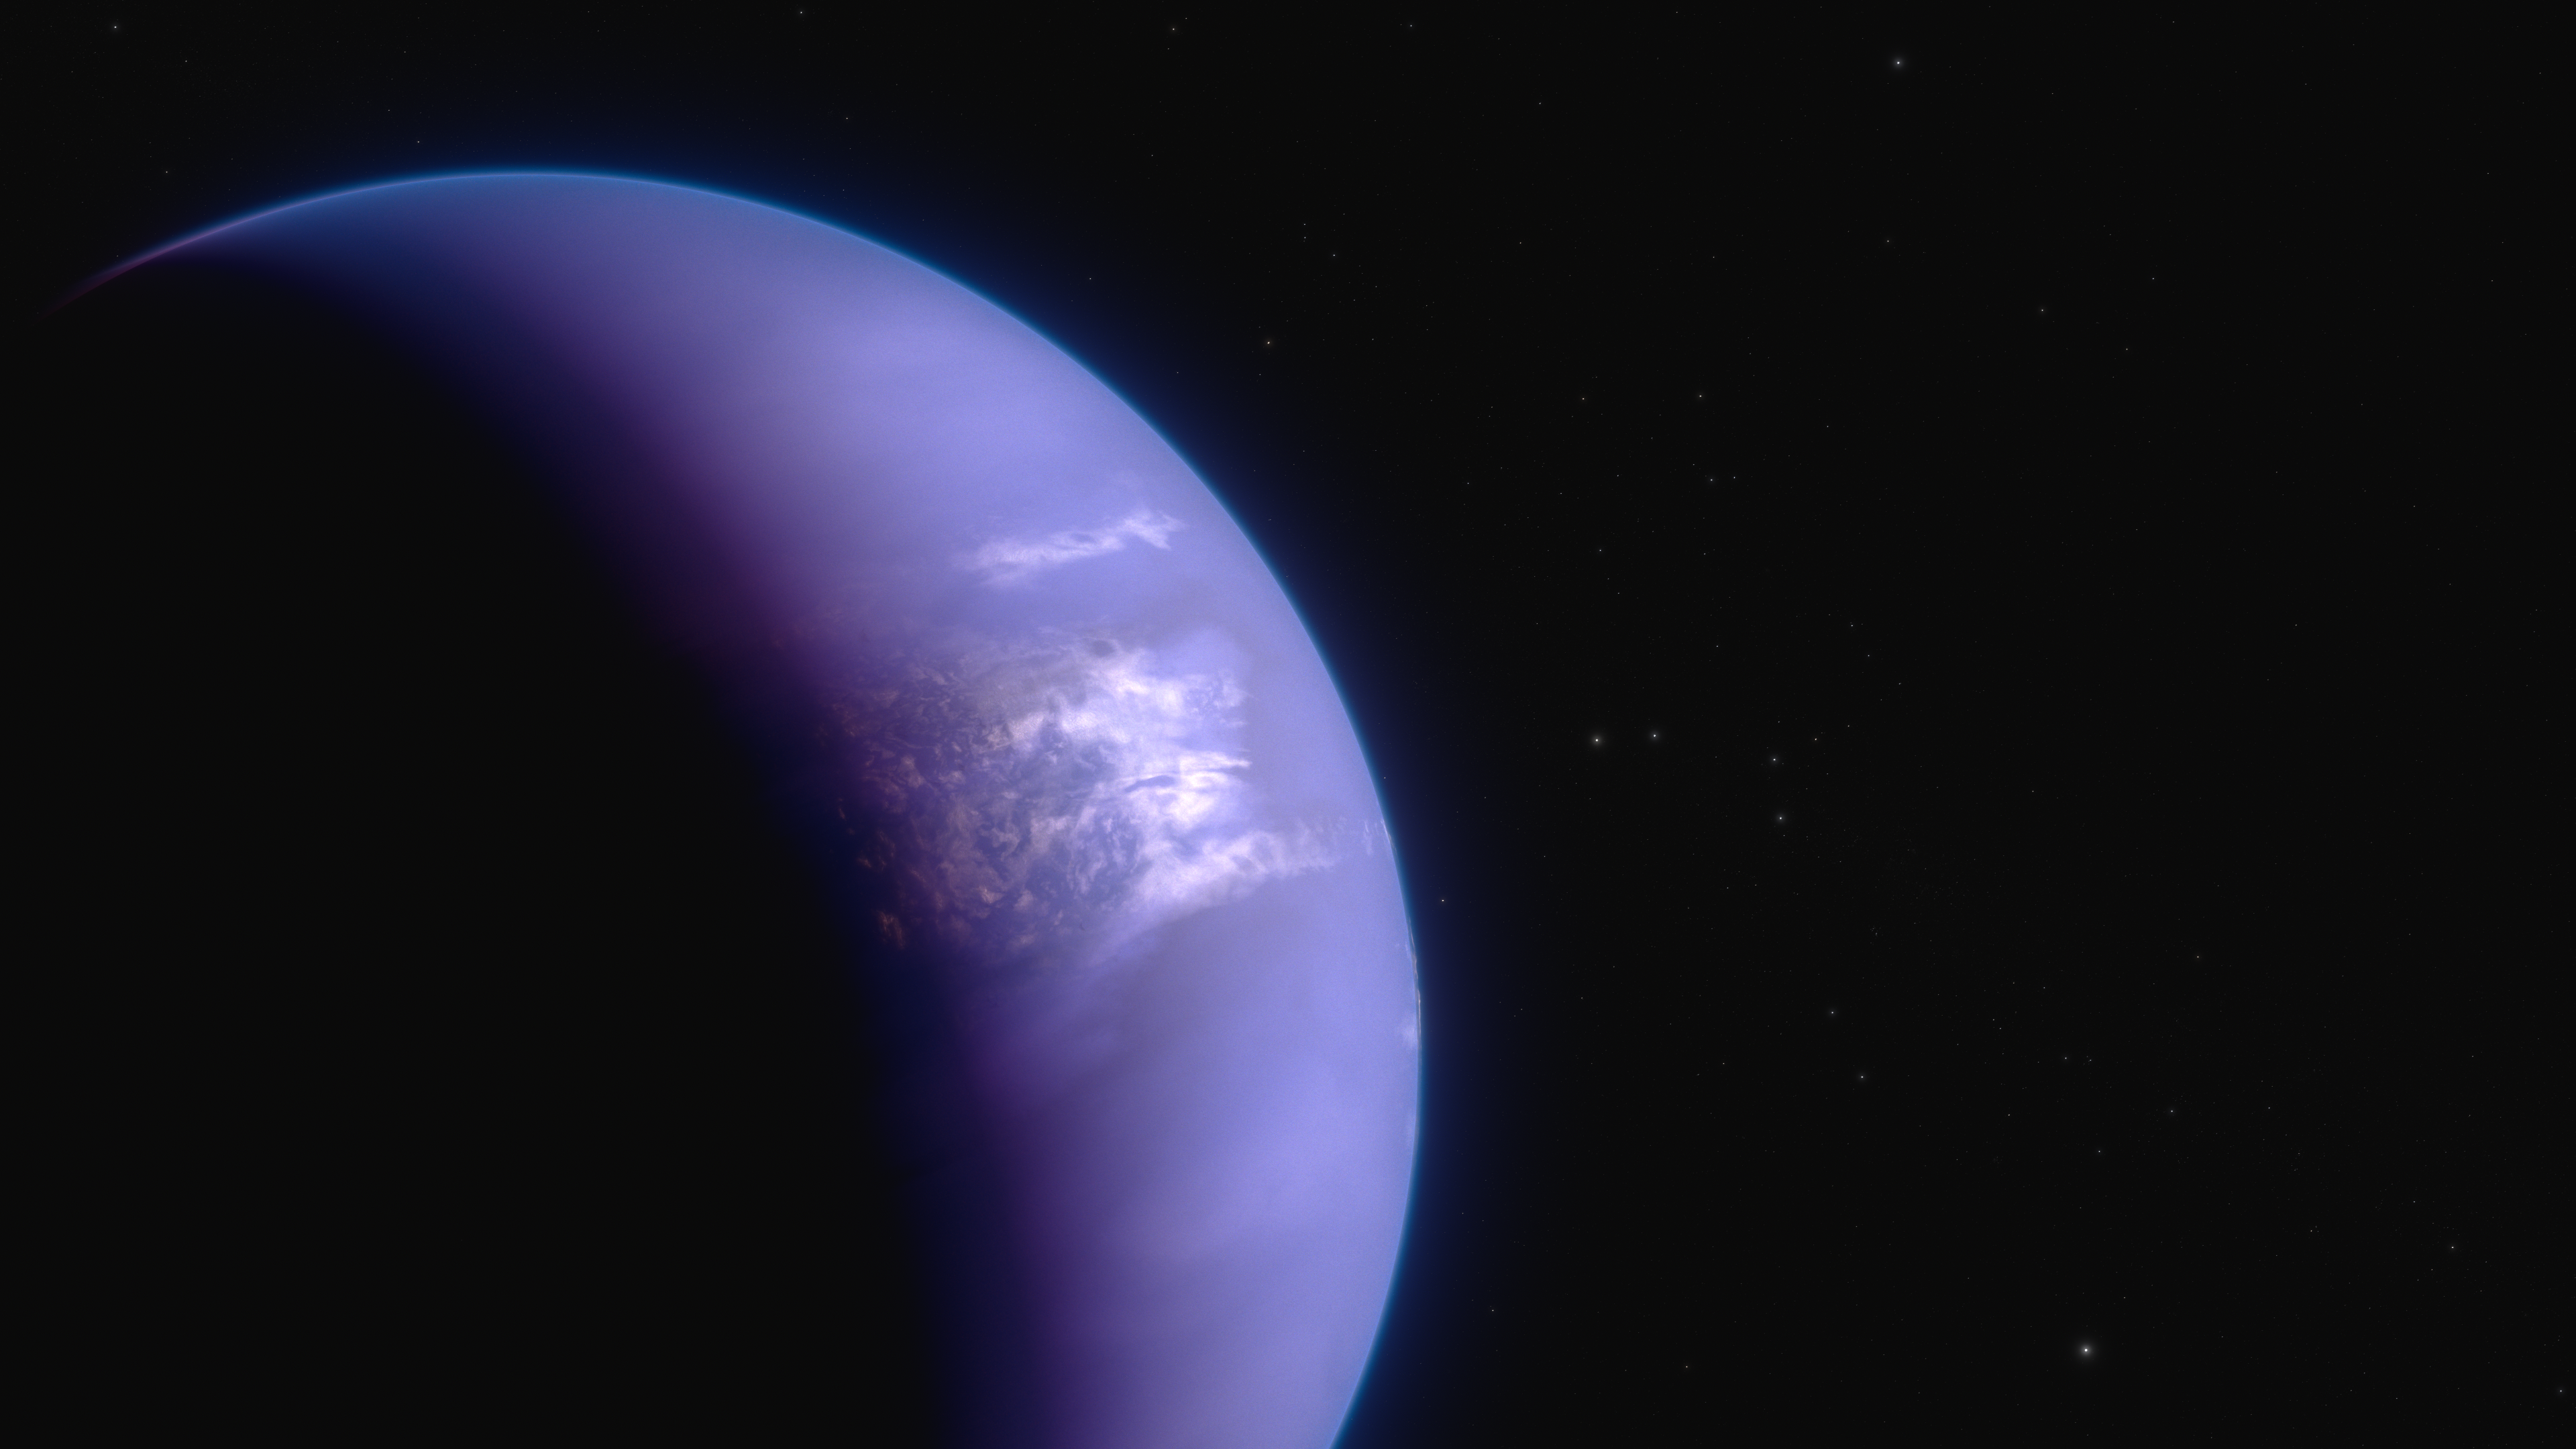

Hot gas giant exoplanet WASP-43 b (artist’s concept)

An international team of researchers has successfully used the NASA/ESA/CSA James Webb Space Telescope to map weather on the hot gas-giant exoplanet WASP-43 b.

This artist’s concept shows what the hot gas giant exoplanet WASP-43 b could look like. WASP-43 b is a Jupiter-sized planet that orbits a star roughly 280 light-years away, in the constellation Sextans. The planet orbits at a distance of about 0.014 AU (1.3 million miles), completing one circuit in about 19.5 hours. Because it is so close to its star, WASP-43 b is probably tidally locked: its rotation rate and orbital period are the same, such that one side faces the star at all times.

Temperature measurements based on the amount of 5- to 12-micron mid-infrared light emitted by the planet show that the nightside is probably covered in thick high clouds. Because it is too hot for liquid water to exist, the clouds are probably made of tiny mineral grains instead of water droplets.

Spectroscopy measurements indicate the presence of water vapour on both the dayside and nightside. A surprising lack of methane on the nightside suggests that strong winds are mixing atmospheric gases around the planet.

This illustration is based on new data gathered by Webb’s Mid-Infrared Instrument (MIRI) as well as previous observations from other ground- and space-based telescopes, including Hubble and Spitzer. Webb has not captured any images of the planet.

Learn more here.

Credit: NASA, ESA, CSA, R. Crawford (STSci)